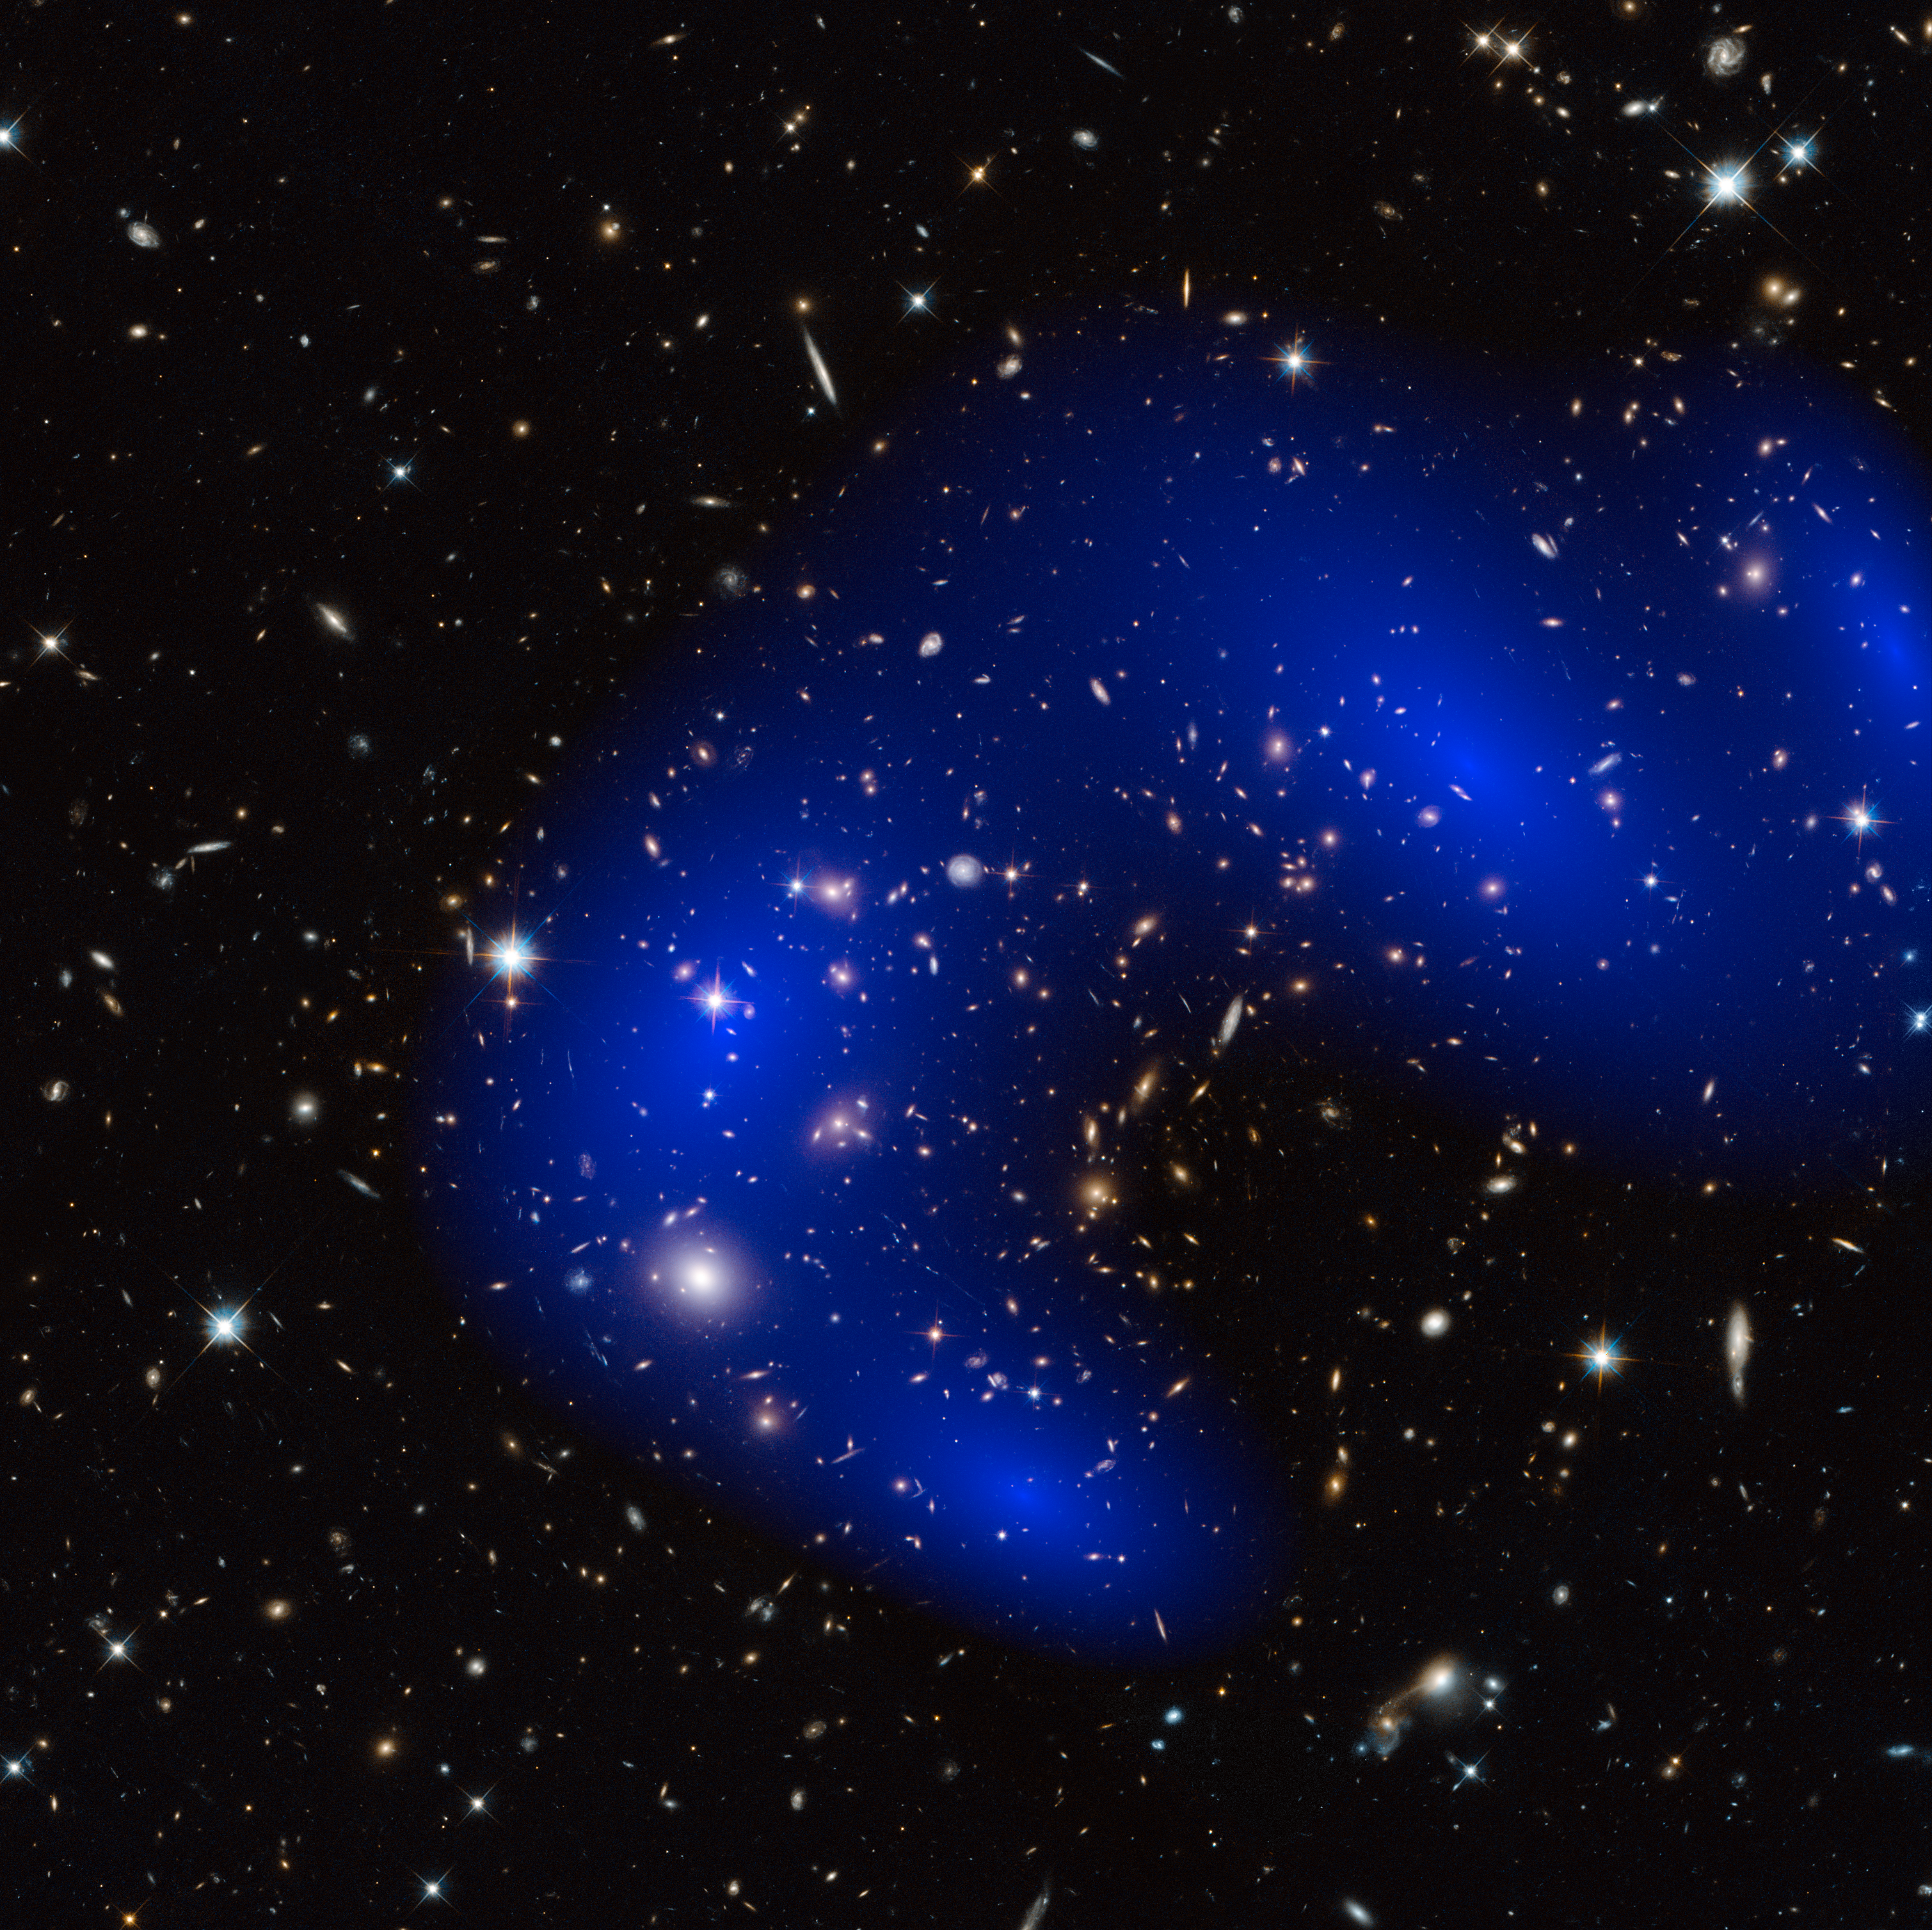

Galaxy cluster MACS J0717.5+3745 with dark matter map

This is a NASA/ESA Hubble Space Telescope image of the galaxy cluster MACS J0717.5+3745. Shown in blue on the image is a map of the dark matter found within the cluster. This cluster was part of a study of 72 galaxy cluster collisions which determined that dark matter interacts with other dark matter even less than previously thought.

Credit: NASA, ESA, D. Harvey (École Polytechnique Fédérale de Lausanne, Switzerland), R. Massey (Durham University, UK), Harald Ebeling (University of Hawaii at Manoa) & Jean-Paul Kneib (LAM)